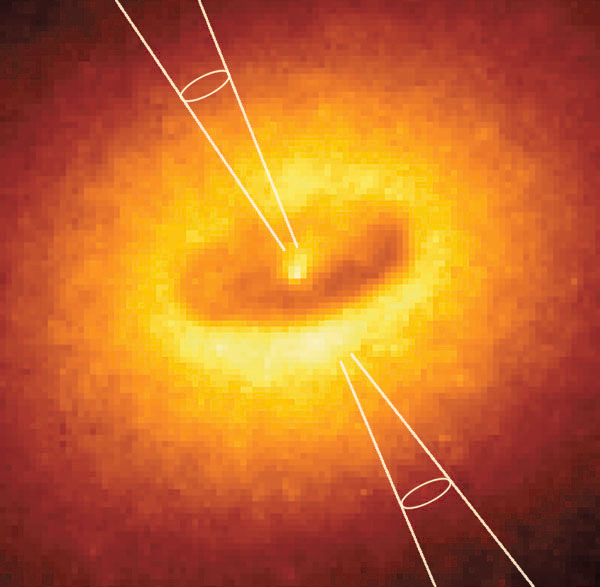

NGC 4261 WFPC with illustration of jet.

This is a Hubble Space Telescope (HST) image of the core of galaxy NGC 4261. The super massive black hole in the center of the galaxy is surrounded by an 800 light year wide spiral shaped dust disk. This material in combination with the black hole is the source for two jets beeing ejected from the galaxy. The position and the direction of these jets are illustrated in the image.

Credit: NASA & ESA